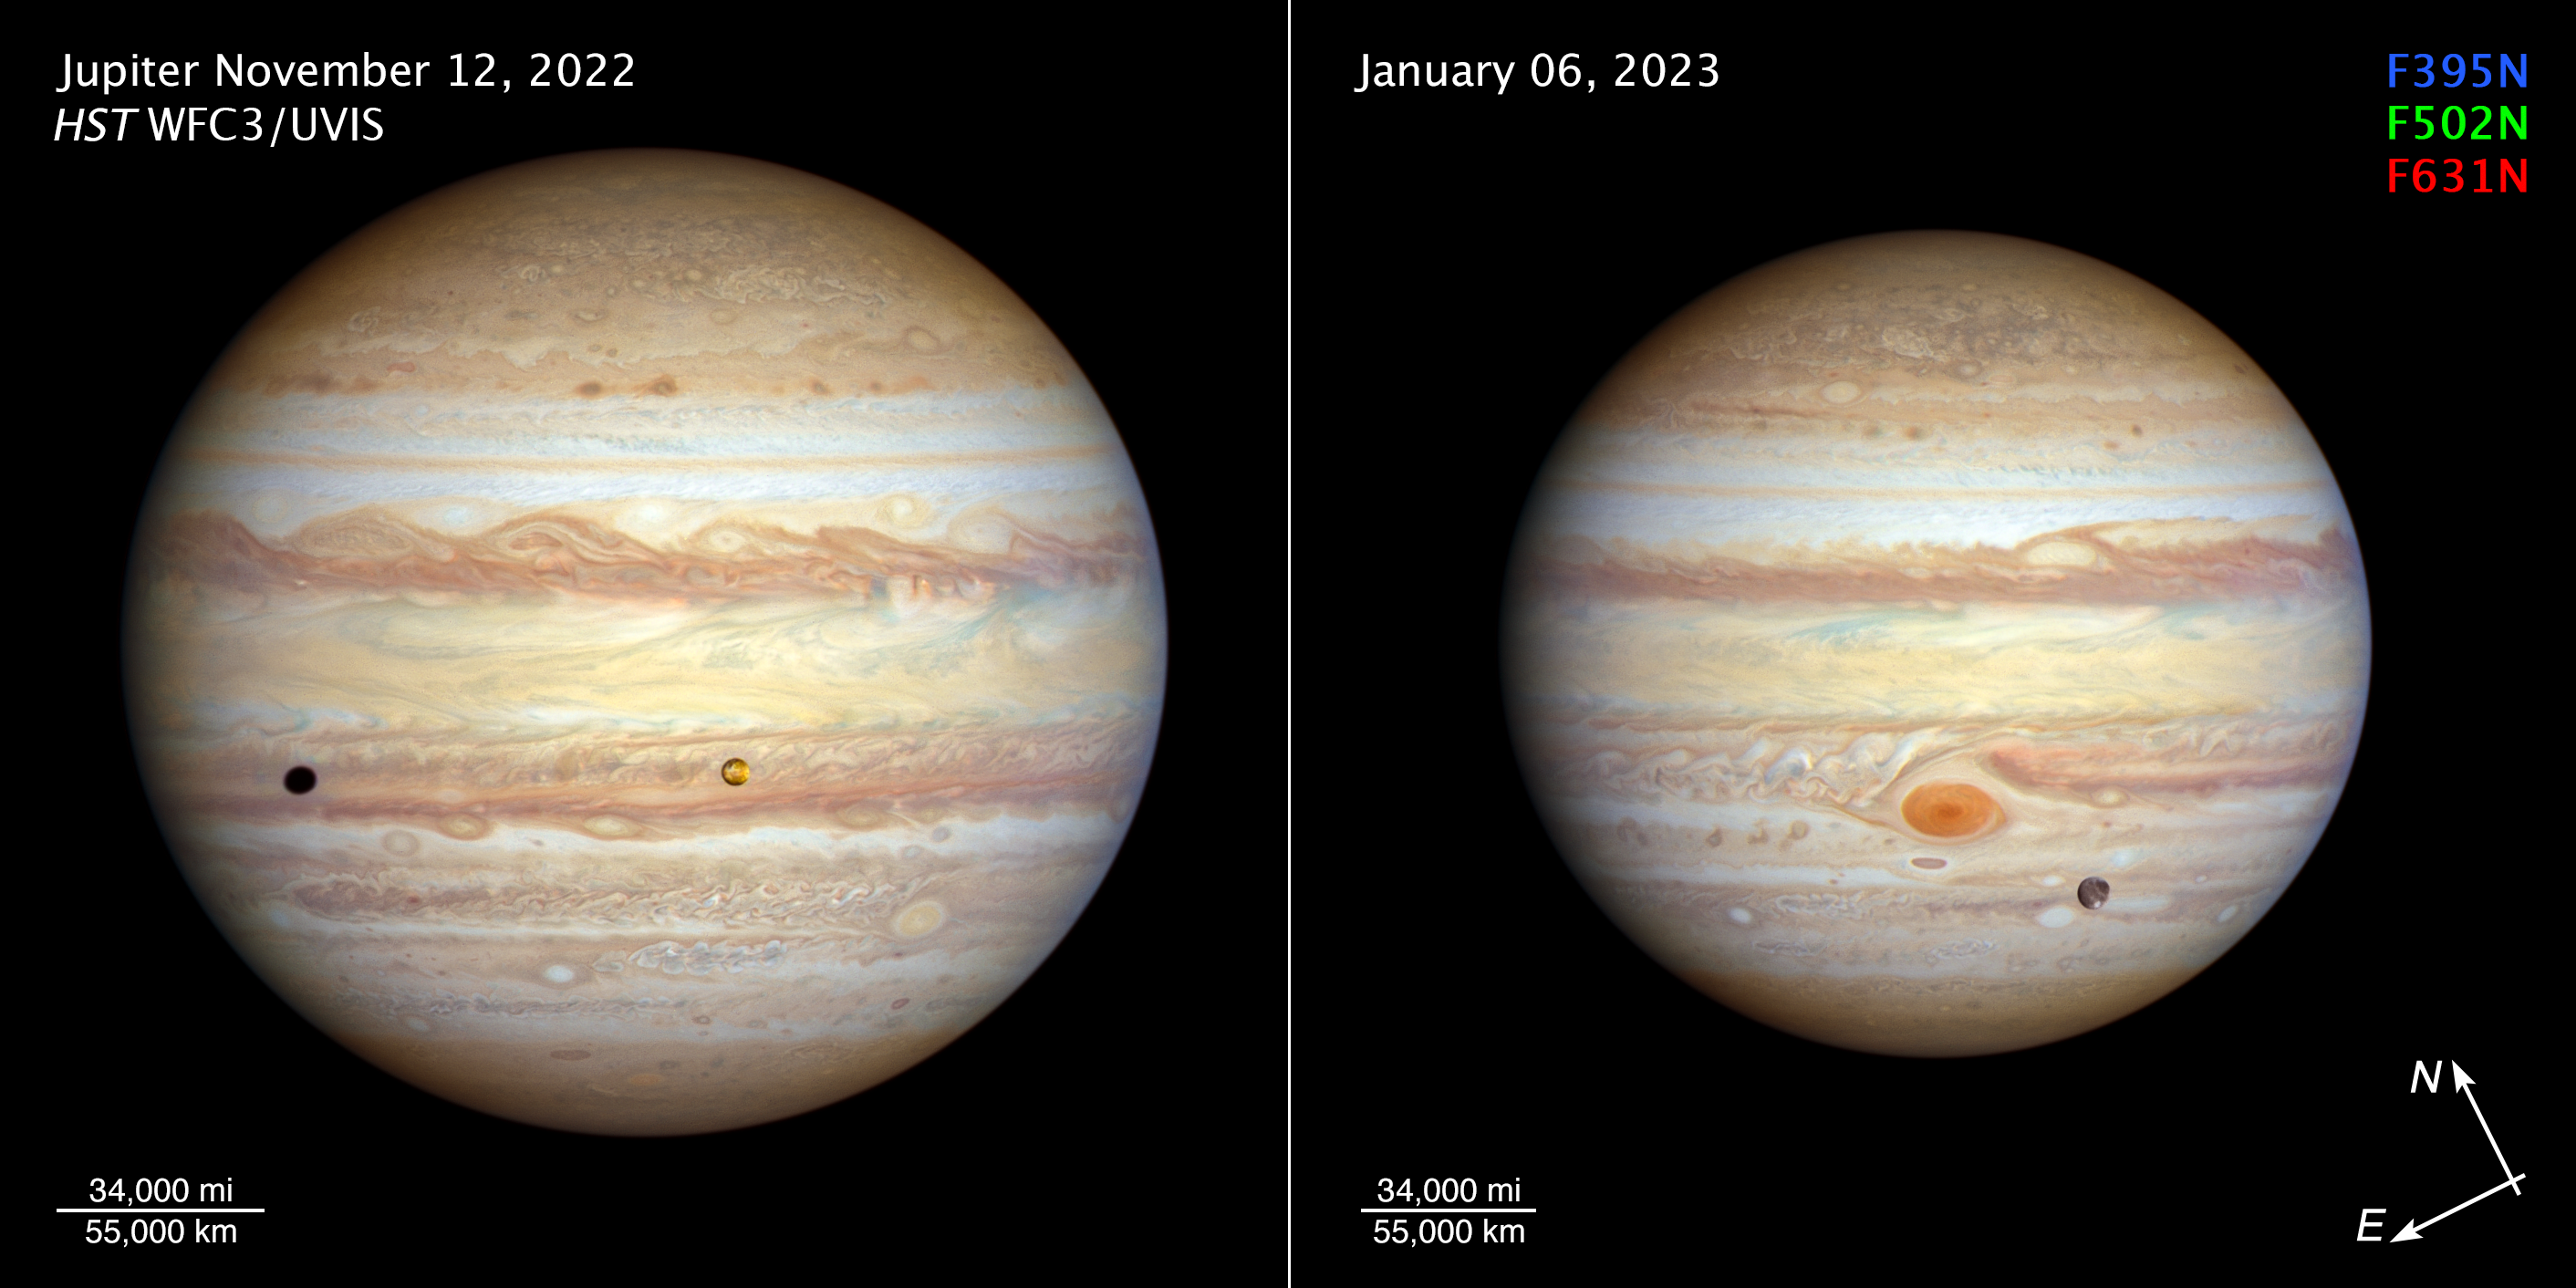

Jupiter (November 2022 and January 2023) compass image

[LEFT] - The forecast for Jupiter is for stormy weather at low northern latitudes. A prominent string of alternating storms is visible, forming a ‘vortex street’ as some planetary astronomers call it. This is a wave pattern of nested cyclones and anticyclones, locked together like the alternating gears of a machine moving clockwise and counterclockwise. If the storms get close enough to each other and merge together, they could build an even larger storm, potentially rivalling the current size of the Great Red Spot. The staggered pattern of cyclones and anticyclones prevents individual storms from merging. Activity is also seen interior to these storms; in the 1990s Hubble didn’t see any cyclones or anticyclones with built-in thunderstorms, but these storms have sprung up in the last decade. Strong colour differences indicate that Hubble is seeing different cloud heights and depths as well.

The orange moon Io photobombs this view of Jupiter’s multicoloured cloud tops, casting a shadow toward the planet’s western limb. Hubble’s resolution is so sharp that it can see Io’s mottled-orange appearance, the result of its numerous active volcanoes. These volcanoes were first discovered when the Voyager 1 spacecraft flew by in 1979. The moon’s molten interior is overlaid by a thin crust through which the volcanoes eject material. Sulphur takes on various hues at different temperatures, which is why Io’s surface is so colourful. This image was taken on 12 November 2022.

[RIGHT] - Jupiter’s legendary Great Red Spot takes centre stage in this view. Though this vortex is big enough to swallow Earth, it has actually shrunk to the smallest size it has ever been according to observation records dating back 150 years. Jupiter’s icy moon Ganymede can be seen transiting the giant planet at lower right. Slightly larger than the planet Mercury, Ganymede is the largest moon in the Solar System. It is a cratered world and has a mainly water-ice surface with apparent glacial flows driven by internal heat. This image was taken on 6 January 2023.

This image is smaller in size because Jupiter was 130,000 kilometres farther from Earth when the image was taken.

Credit: NASA, ESA, STScI, A. Simon (NASA-GSFC), M. H. Wong (UC Berkeley), J. DePasquale (STScI)